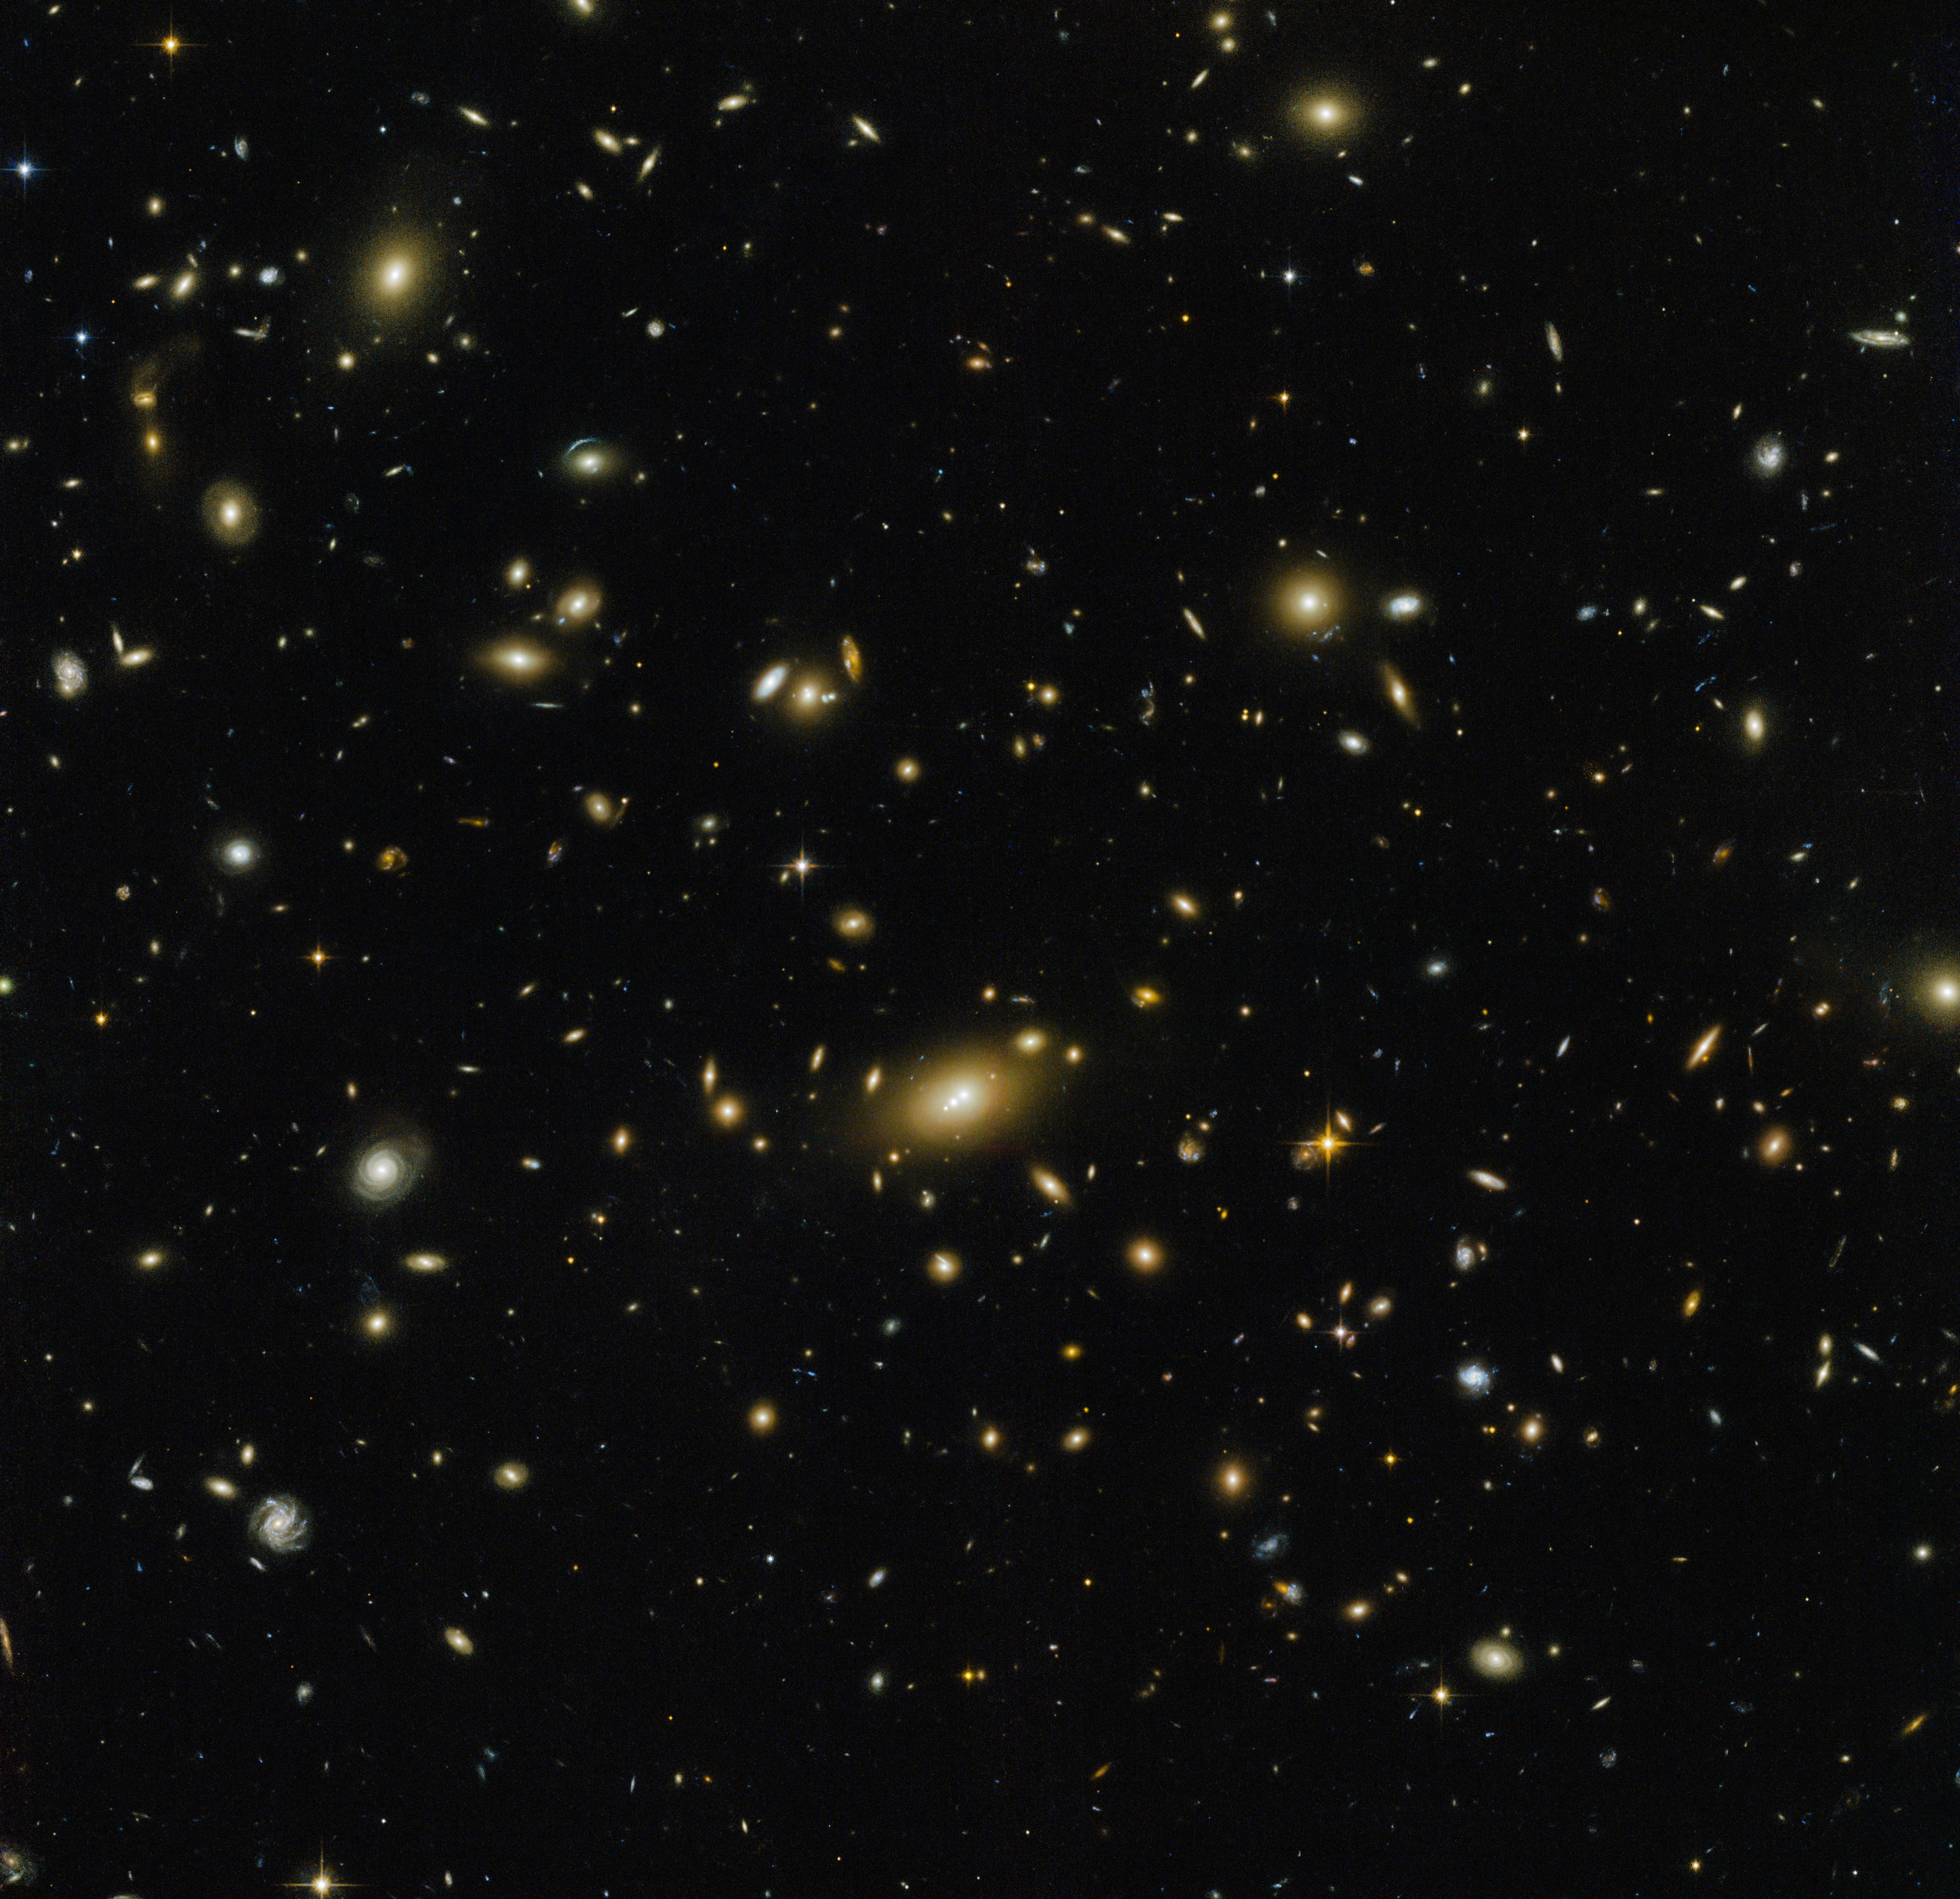

Cosmic RELICS

This NASA/ESA Hubble Space Telescope image seems to sink into the screen, plunging the viewer into the dark depths of the early Universe. Massive galaxy clusters — such as the subject of this image, Abell 1300 — help us to better understand the cosmos. They are essentially giant natural telescopes, magnifying the light from any galaxies sitting behind them and helping us peer further back in time.

This bizarre kind of time travel is possible due to a phenomenon called gravitational lensing, whereby the gravitational influence of a massive object such as Abell 1300 acts like a lens, bending the very fabric of space around it and thus causing more distant light to move in a curved path. To the observer, the source of the light — a background object such as a primordial galaxy, for example — appears both distorted and magnified. The lensing power of massive clusters has helped us to discover some of the most distant known galaxies in the Universe. Hubble has observed this phenomenon many times; see a selection of images here.

This image was taken by Hubble’s Advanced Camera for Surveys and Wide-Field Camera 3 as part of an observing program called RELICS. The program imaged 41 massive galaxy clusters over the course of 390 Hubble orbits and 100 Spitzer Space Telescope observing hours, aiming to find the brightest distant galaxies. Studying these galaxies in more detail with both current telescopes and the future NASA/ESA/CSA James Webb Space Telescope (JWST) will hopefully tell us more about our cosmic origins.

Credit: ESA/Hubble & NASA